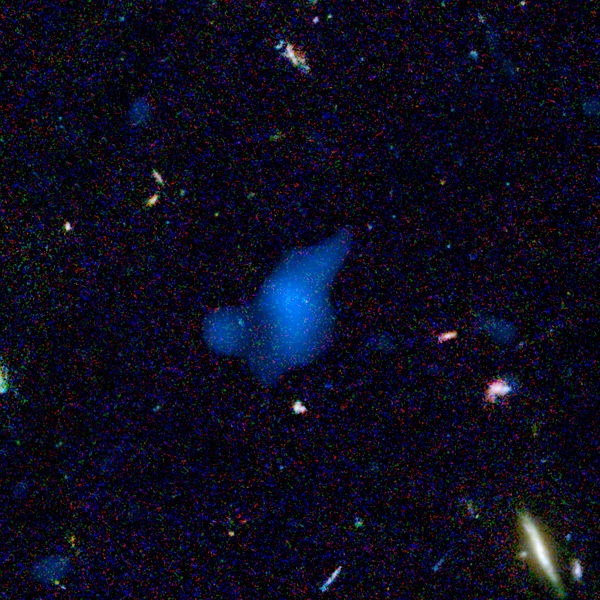

Hubble+Chandra: Object #7 53.215169-27.870226

Astronomers unveiled the deepest images from NASA's new Spitzer Space Telescope today, and announced the detection of distant objects — including several supermassive black holes — that are nearly invisible in even the deepest images from telescopes operating at other wavelengths.

Credit: NASA, ESA, A. M. Koekemoer (STScI), M. Dickinson (NOAO) and The GOODS Team